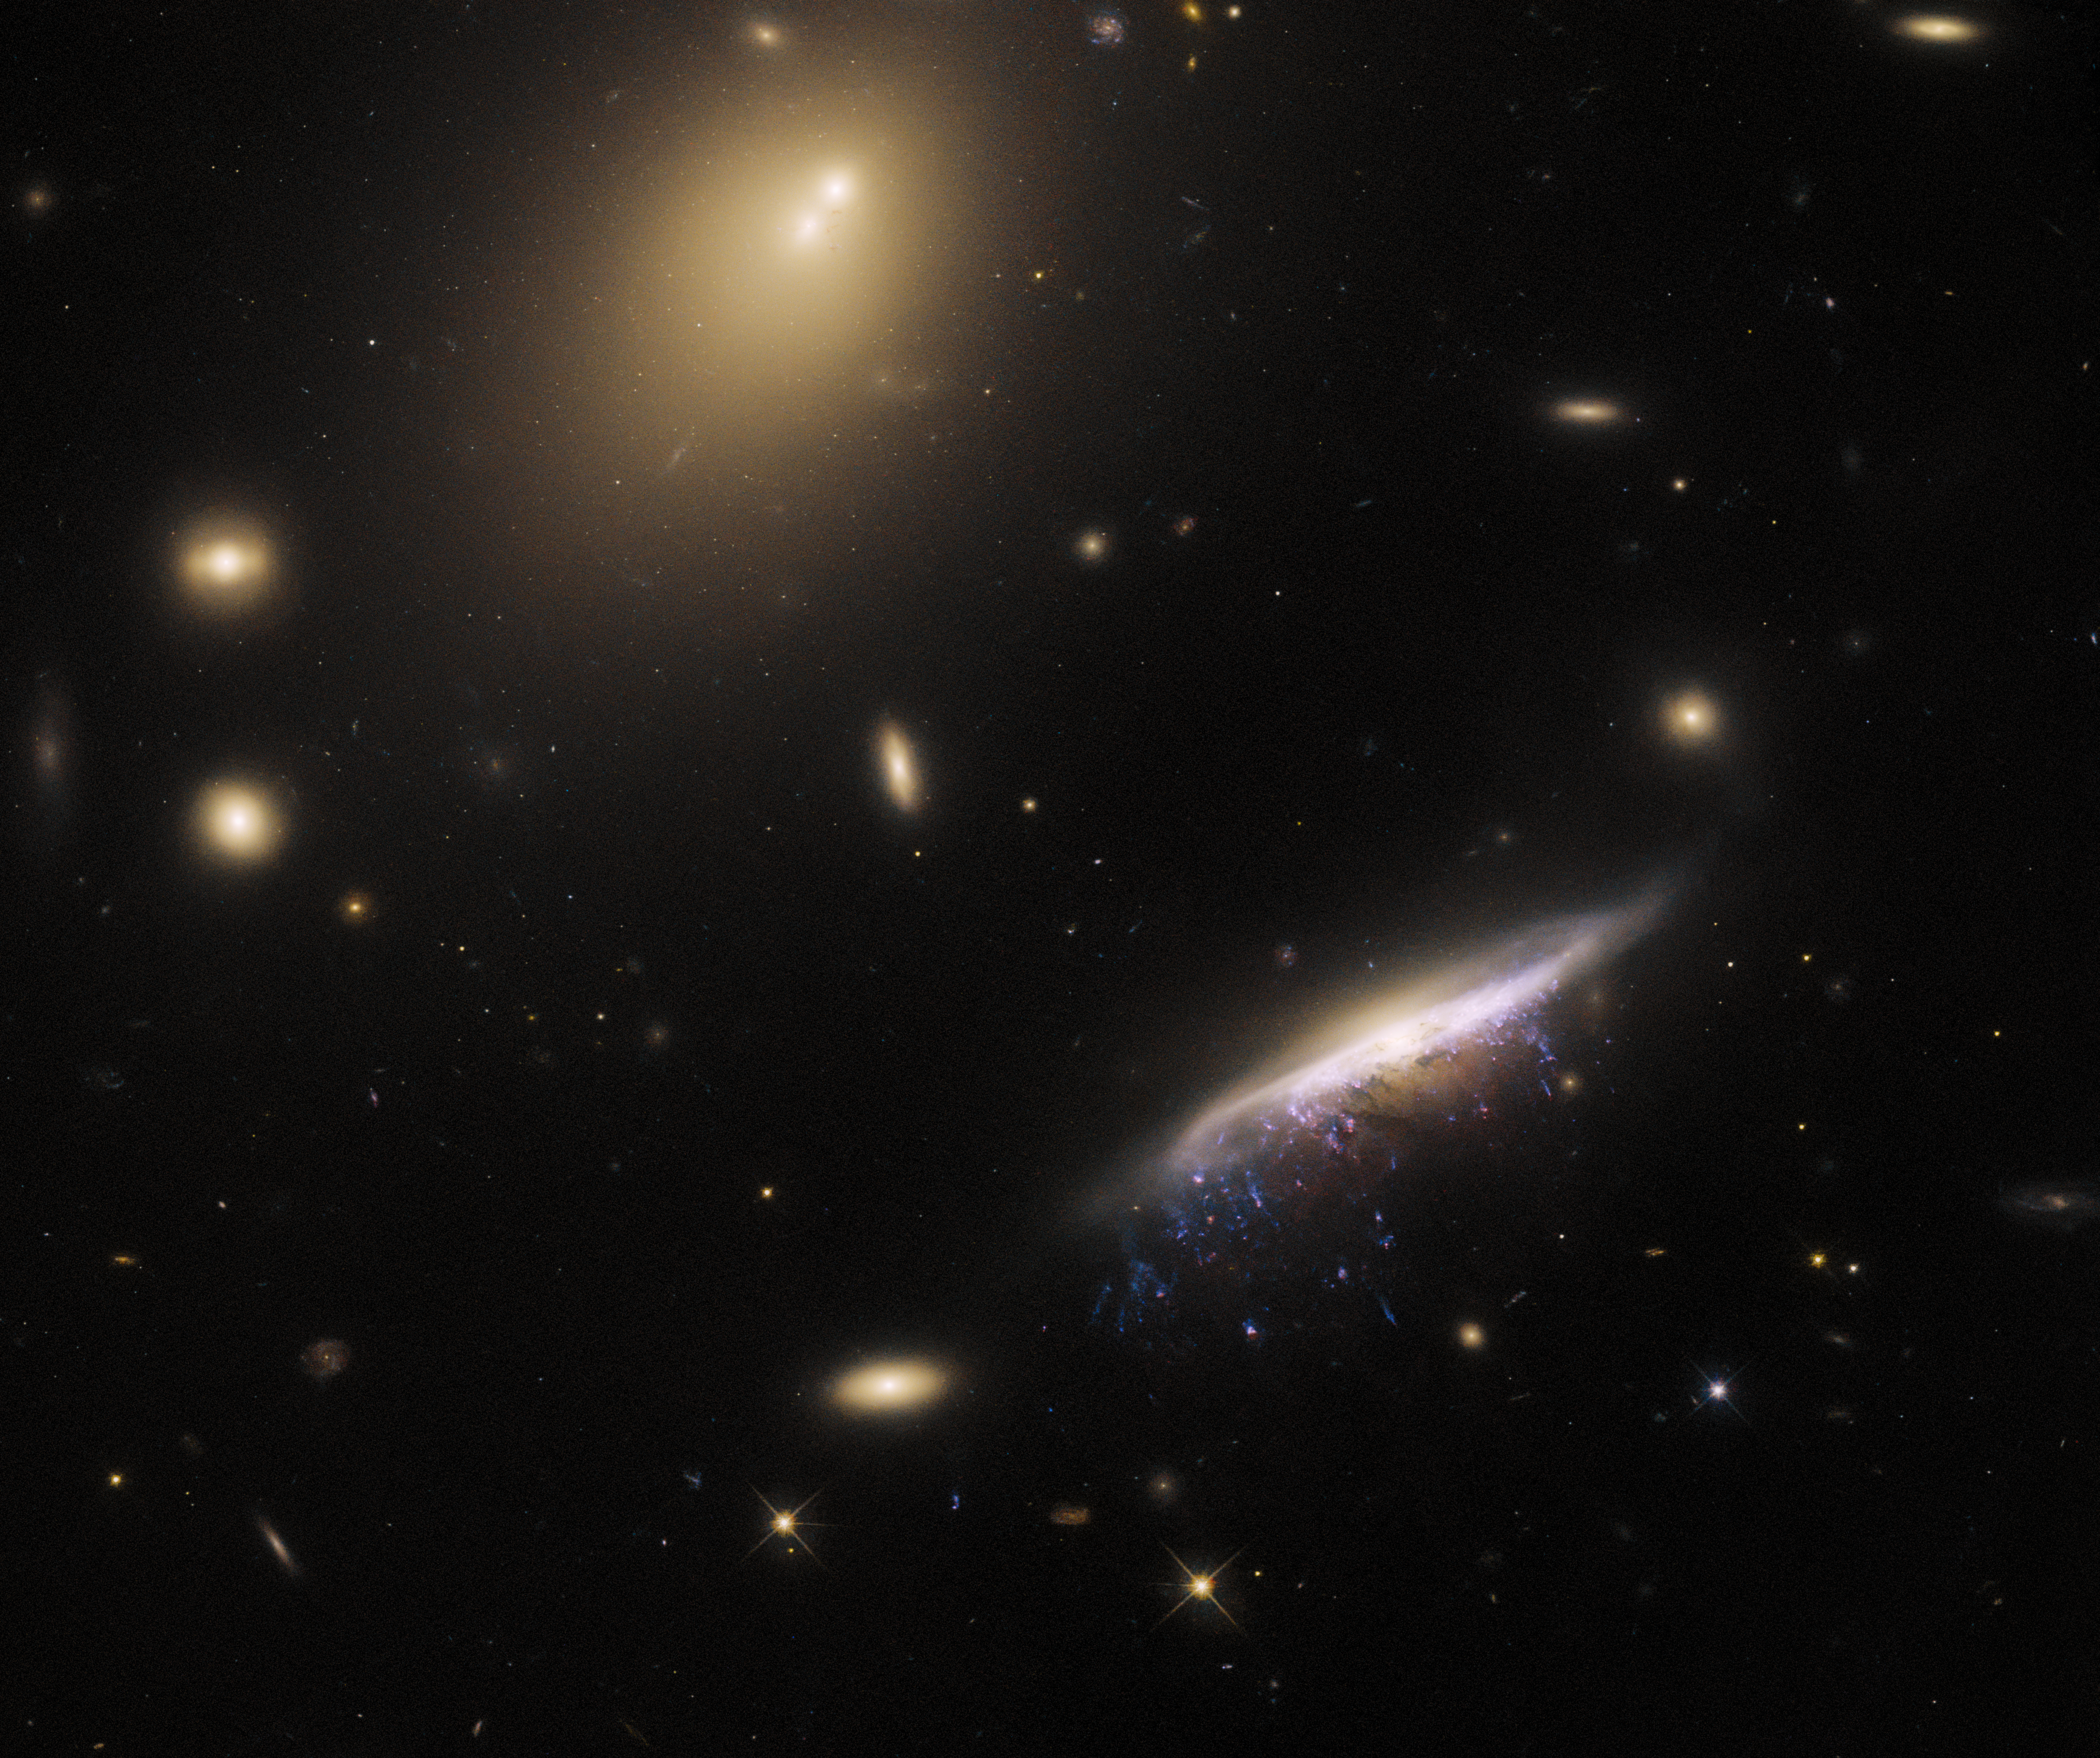

Portrait of a galactic jellyfish

The galaxy JW100 features prominently in this image from the NASA/ESA Hubble Space Telescope, with streams of star-forming gas dripping from the disc of the galaxy like streaks of fresh paint. These tendrils of bright gas are formed by a process called ram pressure stripping, and their resemblance to dangling tentacles has led astronomers to refer to JW100 as a ‘jellyfish’ galaxy. It is located in the constellation Pegasus, over 800 million light-years away.

Ram pressure stripping occurs when galaxies encounter the diffuse gas that pervades galaxy clusters. As galaxies plough through this tenuous gas it acts like a headwind, stripping gas and dust from the galaxy and creating the trailing streamers that prominently adorn JW100. The bright elliptical patches in the image are other galaxies in the cluster that hosts JW100.

As well as JW100’s bright tendrils, this image also contains a remarkably bright area of diffuse light towards the top of this image which contains two bright blotches at its core. This is the core of IC 5338, the brightest galaxy in the galaxy cluster, known as a cD galaxy. It’s not unusual for cD galaxies to exhibit multiple nuclei, as they are thought to grow by consuming smaller galaxies, the nuclei of which can take a long time to be absorbed. The bright points of light studding its outer fringes are a rich population of globular clusters.

This observation took advantage of the capabilities of Hubble’s Wide Field Camera 3, and is part of a sequence of observations designed to explore star formation in the tendrils of jellyfish galaxies. These tendrils represent star formation under extreme conditions, and could help astronomers understand the process of star formation elsewhere in the universe.

Credit: ESA/Hubble & NASA, M. Gullieuszik and the GASP team